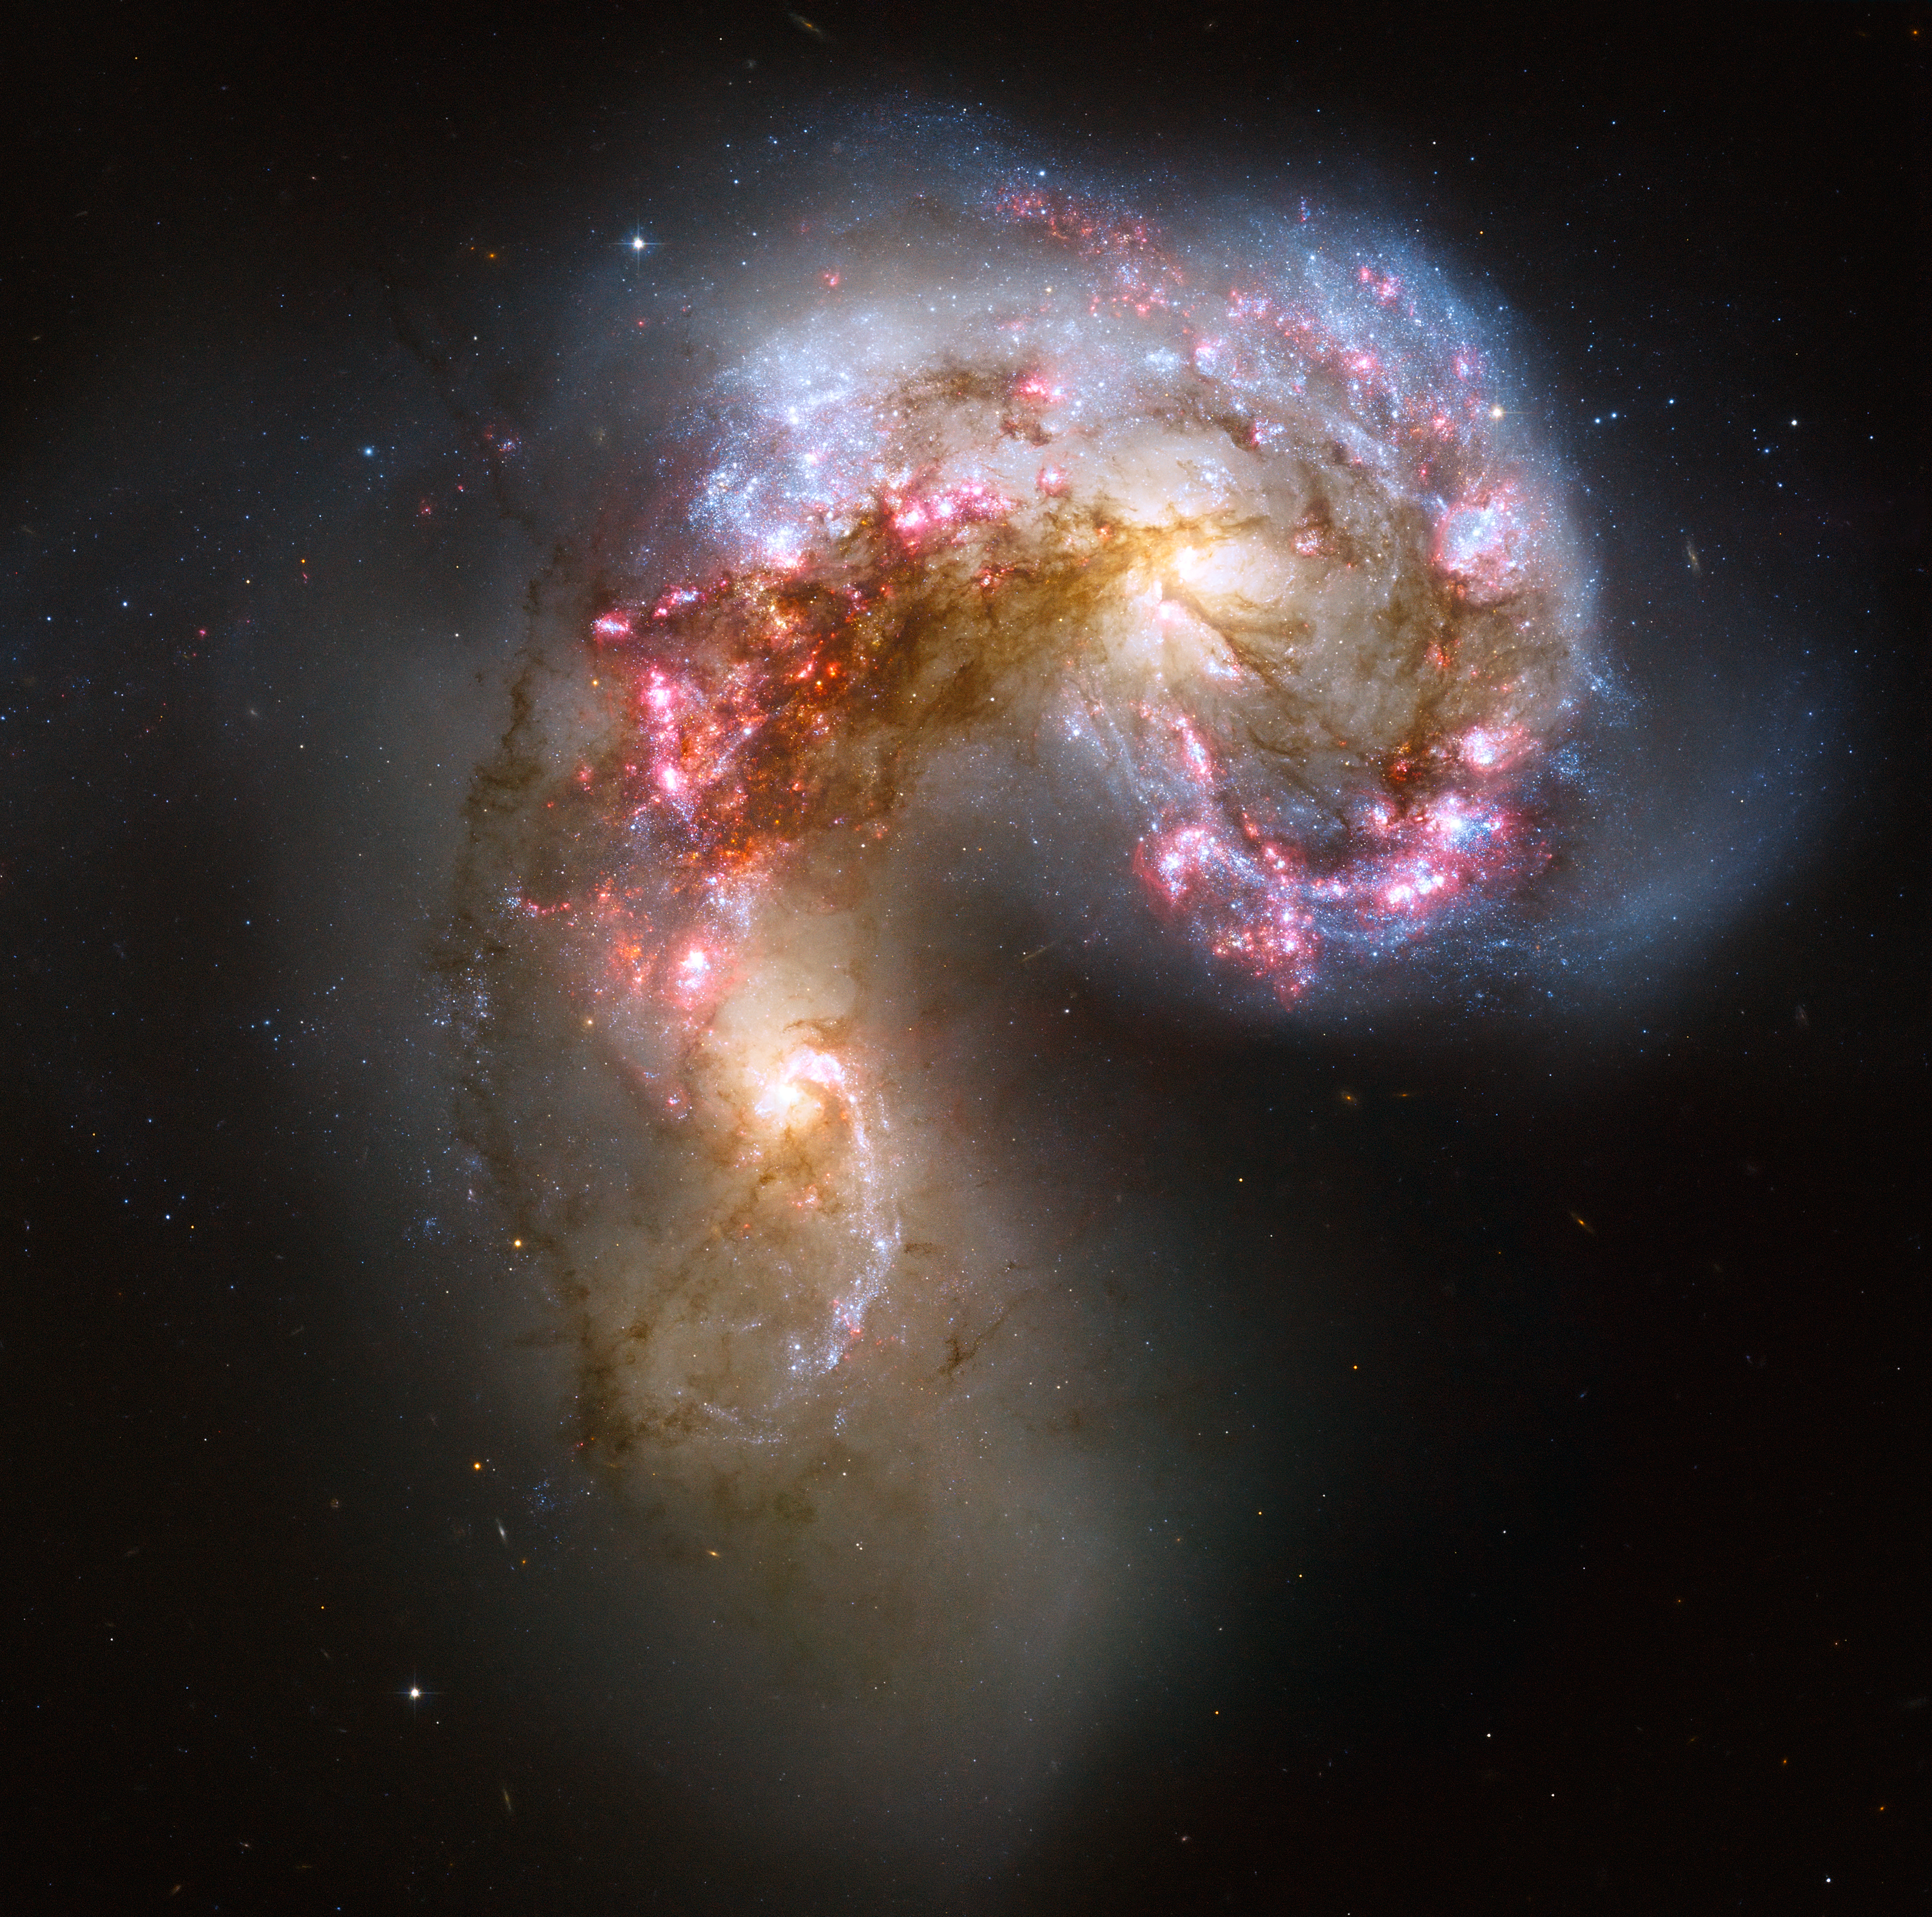

Colliding galaxies make love, not war

This Hubble image of the Antennae galaxies is the sharpest yet of this merging pair of galaxies. As the two galaxies smash together, billions of stars are born, mostly in groups and clusters of stars. The brightest and most compact of these are called super star clusters.

Credit: NASA, ESA, and the Hubble Heritage Team (STScI/AURA)-ESA/Hubble Collaboration. Acknowledgement: B. Whitmore ( Space Telescope Science Institute) and James Long (ESA/Hubble).